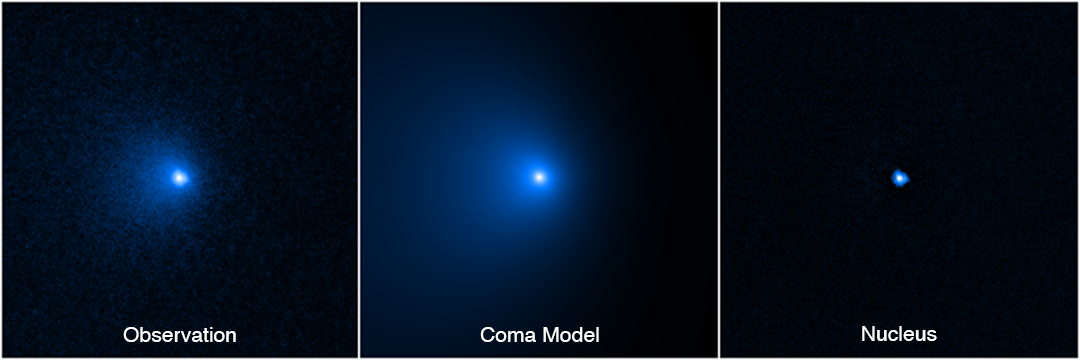

Hubble Confirms Largest Comet Nucleus Ever Seen

The NASA/ESA Hubble Space Telescope has determined the size of the largest icy comet nucleus ever seen by astronomers.

This image sequence shows how the nucleus of Comet C/2014 UN271 (Bernardinelli-Bernstein) was isolated from a vast shell of dust and gas surrounding the solid icy nucleus. On the left is a photo of the comet taken by the NASA/ESA Hubble Space Telescope's Wide Field Camera 3 on 8 January 2022. A model of the coma (middle panel) was obtained by means of fitting the surface brightness profile assembled from the observed image on the left. This allowed for the coma to be subtracted, unveiling the point-like glow from the nucleus. Combined with radio telescope data, astronomers arrived at a precise measurement of the nucleus size. That's no small feat from something roughly 4.8 billion kilometres away. Though the nucleus is estimated to be as large as 135 kilometres across, it is so far away it cannot be resolved by Hubble. Its size is derived from its reflectivity as measured by Hubble. The nucleus is estimated to be as black as charcoal. The nucleus area is gleaned from radio observations.

Credit: NASA, ESA, Man-To Hui (Macau University of Science and Technology), David Jewitt (UCLA), Alyssa Pagan (STScI)